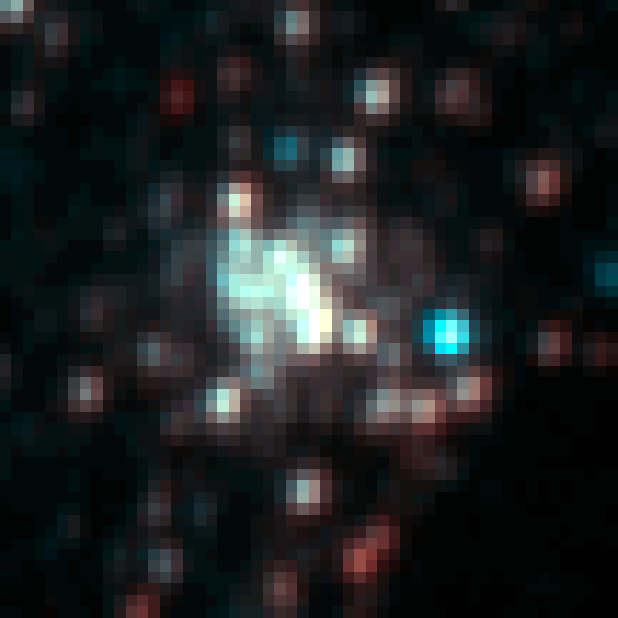

Arches Cluster: Lick 3m (1994)

This picture was taken in 1994 using the 3 metre Lick telescope from the University of Claifornia. It presents the Arches Cluster, the densest known star cluster in the Milky Way. The cluster is located about 25 000 light years from Earth in the constellation of Sagittarius. The radius of the cluster is only about one light year, but it contains about 150 stars, all of which are larger and more massive than the Sun.

Credit: NASA, ESA, D. Figer (STScI)